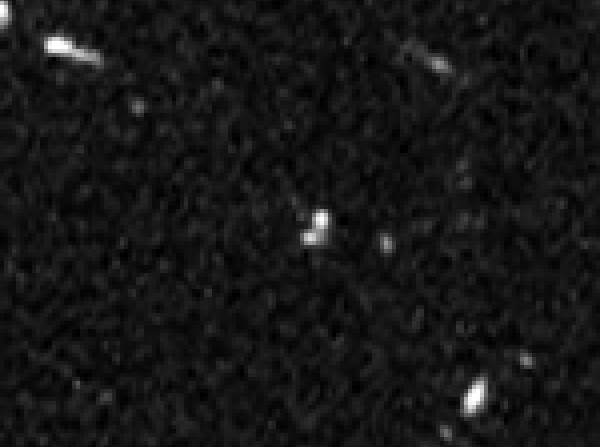

HUDF detail with SN Primo

This image shows part of the Hubble Ultra Deep Field in which SN Primo, the most distant Type Ia to be confirmed to date, was found.

This image shows the field during the supernova explosion, with the bright spot visible compared to images taken beforehand.

Credit: NASA, ESA, A. Riess (STScI and JHU), and S. Rodney (JHU)